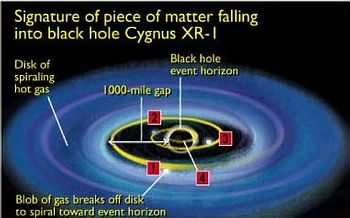

Signature of piece of matter falling into black hole Cygnus XR-1

Signature of piece of matter falling into black hole Cygnus XR-1.

Credit: Ann Feild (STScI)